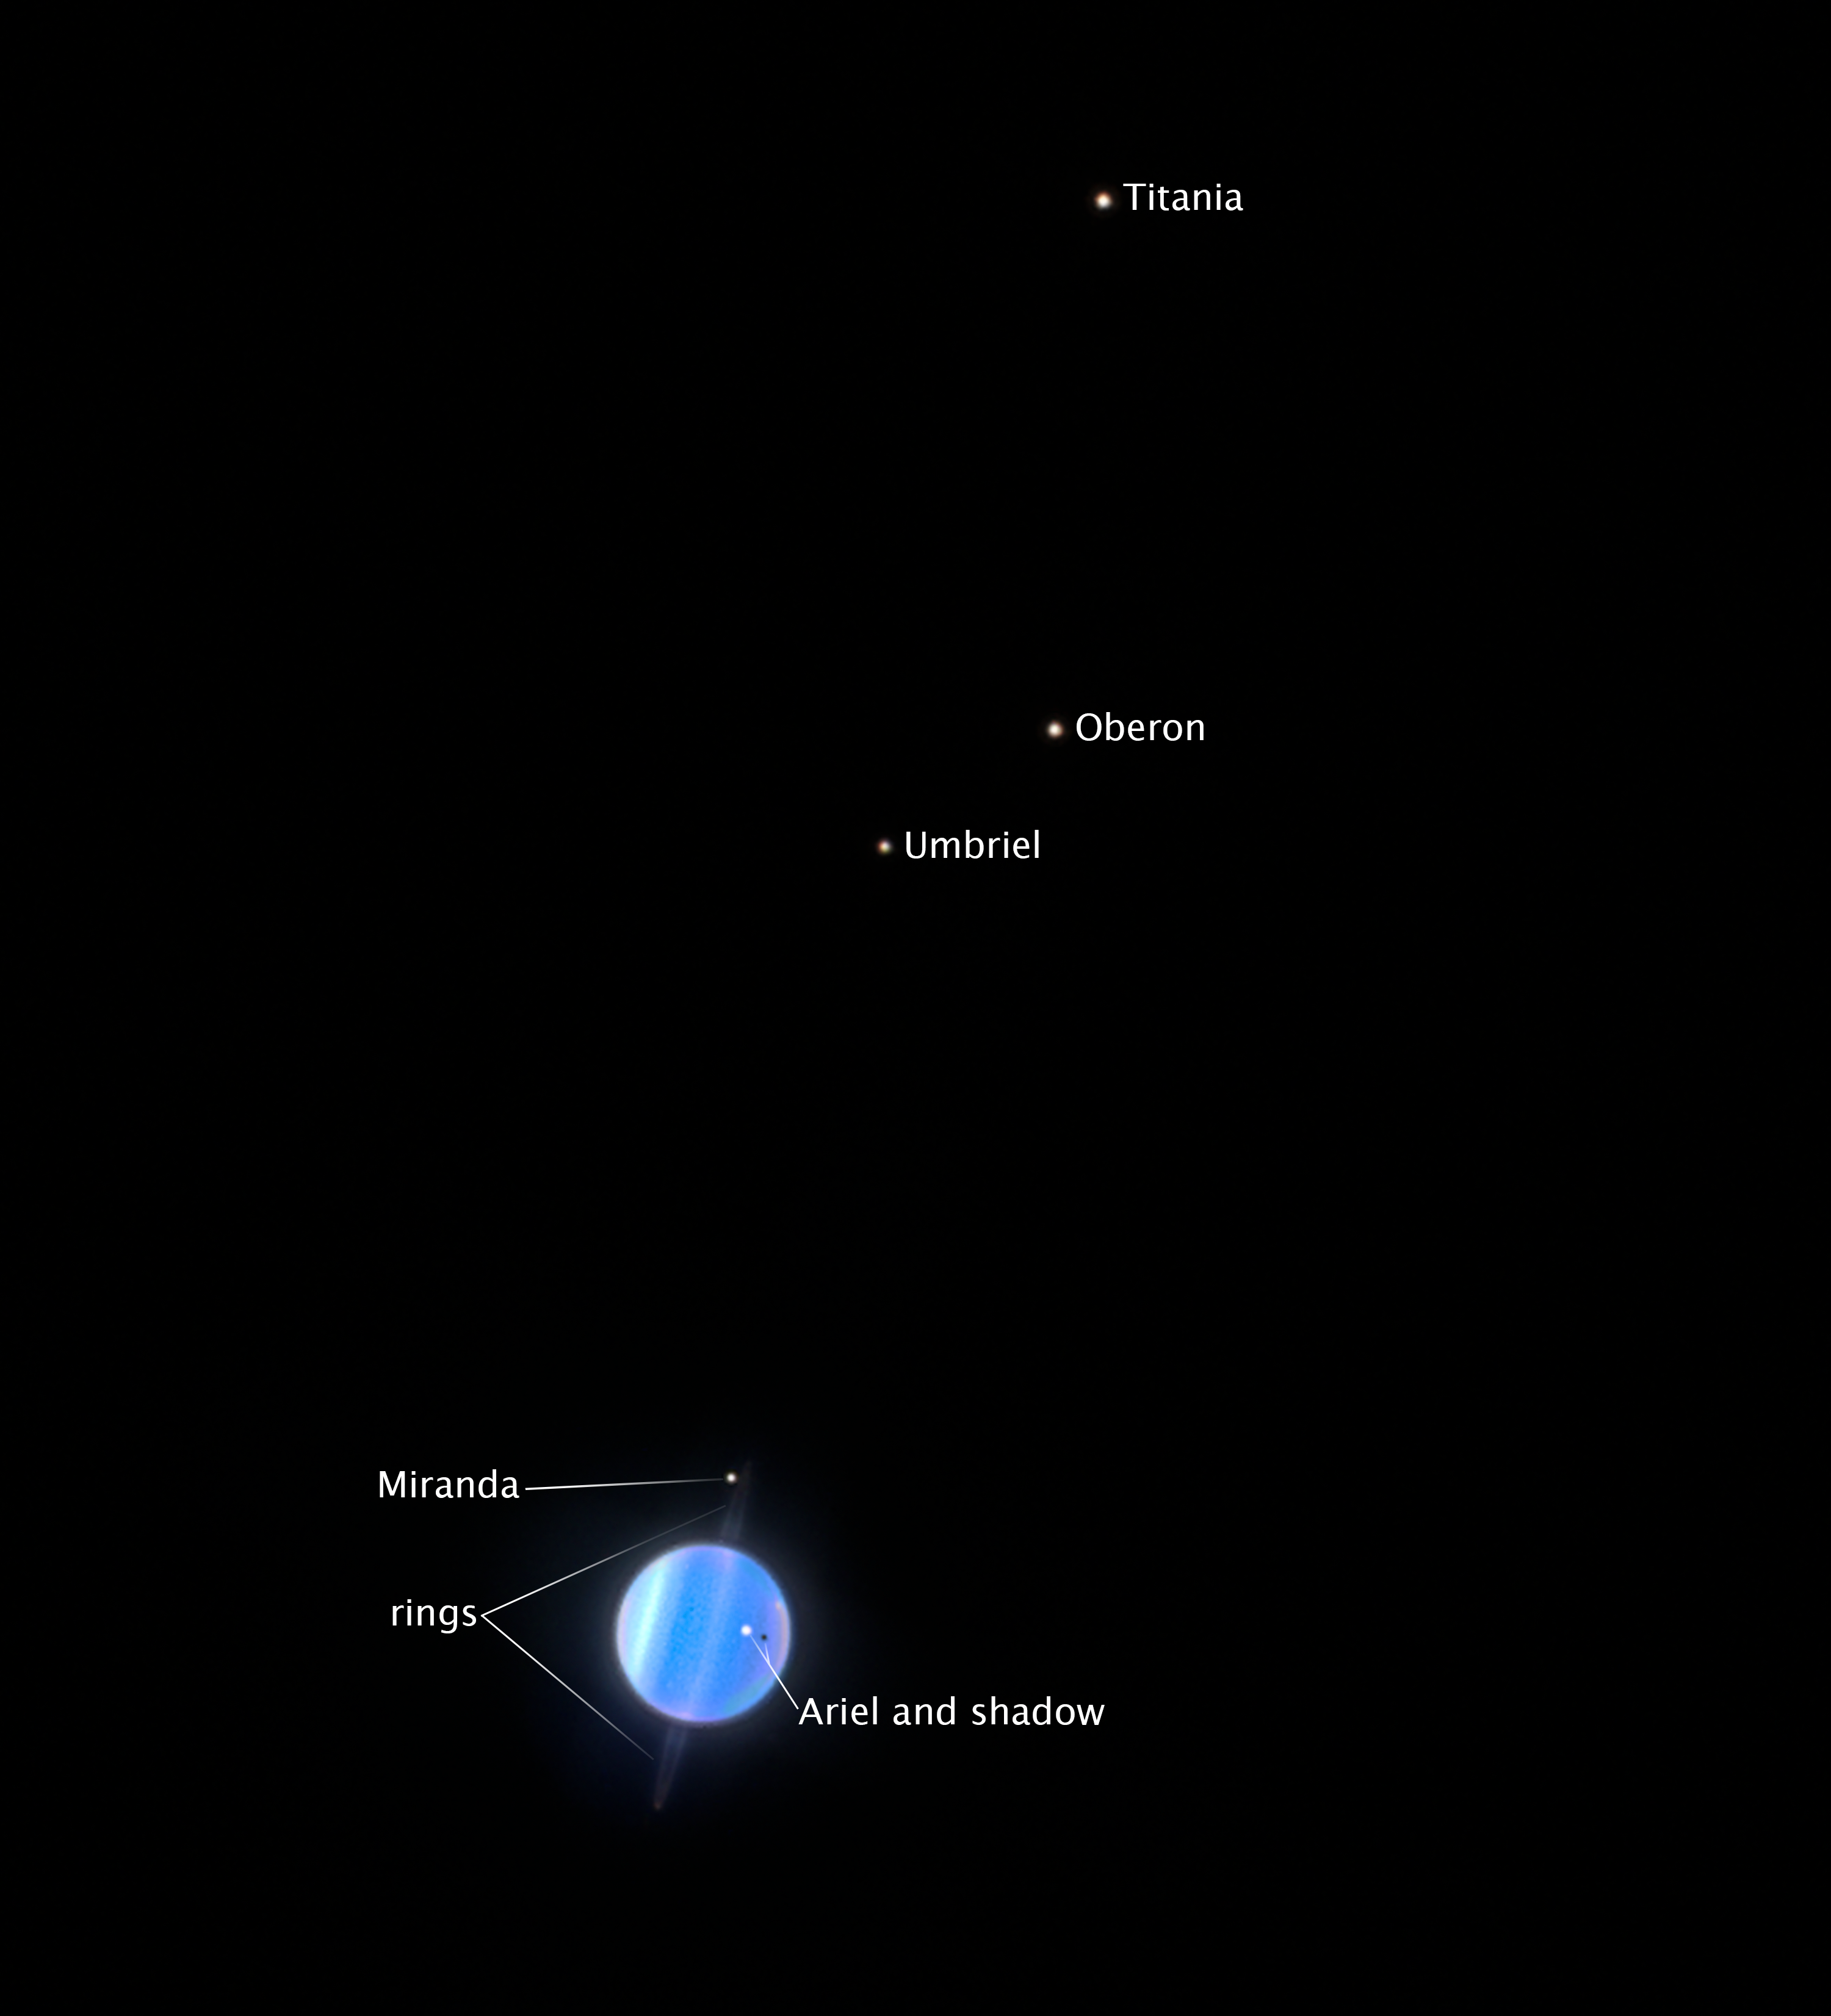

Uranus and its four largest moons

Astronomers studied the four largest moons of Uranus with the NASA/ESA Hubble Space Telescope. At a distance of 3.2 billion kilometres from Earth, the icy satellites Ariel, Umbriel, Titania, and Oberon are tiny points of light. But by using Hubble’s ultraviolet capabilities, astronomers could deduce their surface characteristics.

Scientists predicted that the planet’s magnetic field would make the moons two-toned, with each moon’s trailing side being darker than the leading side (the hemisphere facing its direction of travel around Uranus). But surprisingly, they found the opposite on the two outer large moons, Titania and Oberon. These moons appear darker on the leading side as they sweep up dust like bugs on a windshield as they travel along their orbits.

They also appear to be shielding the two inner moons, Ariel and Umbriel, from the dark dust. The inner moons show no difference in brightness from side to side.

Credit: NASA, ESA, STScI